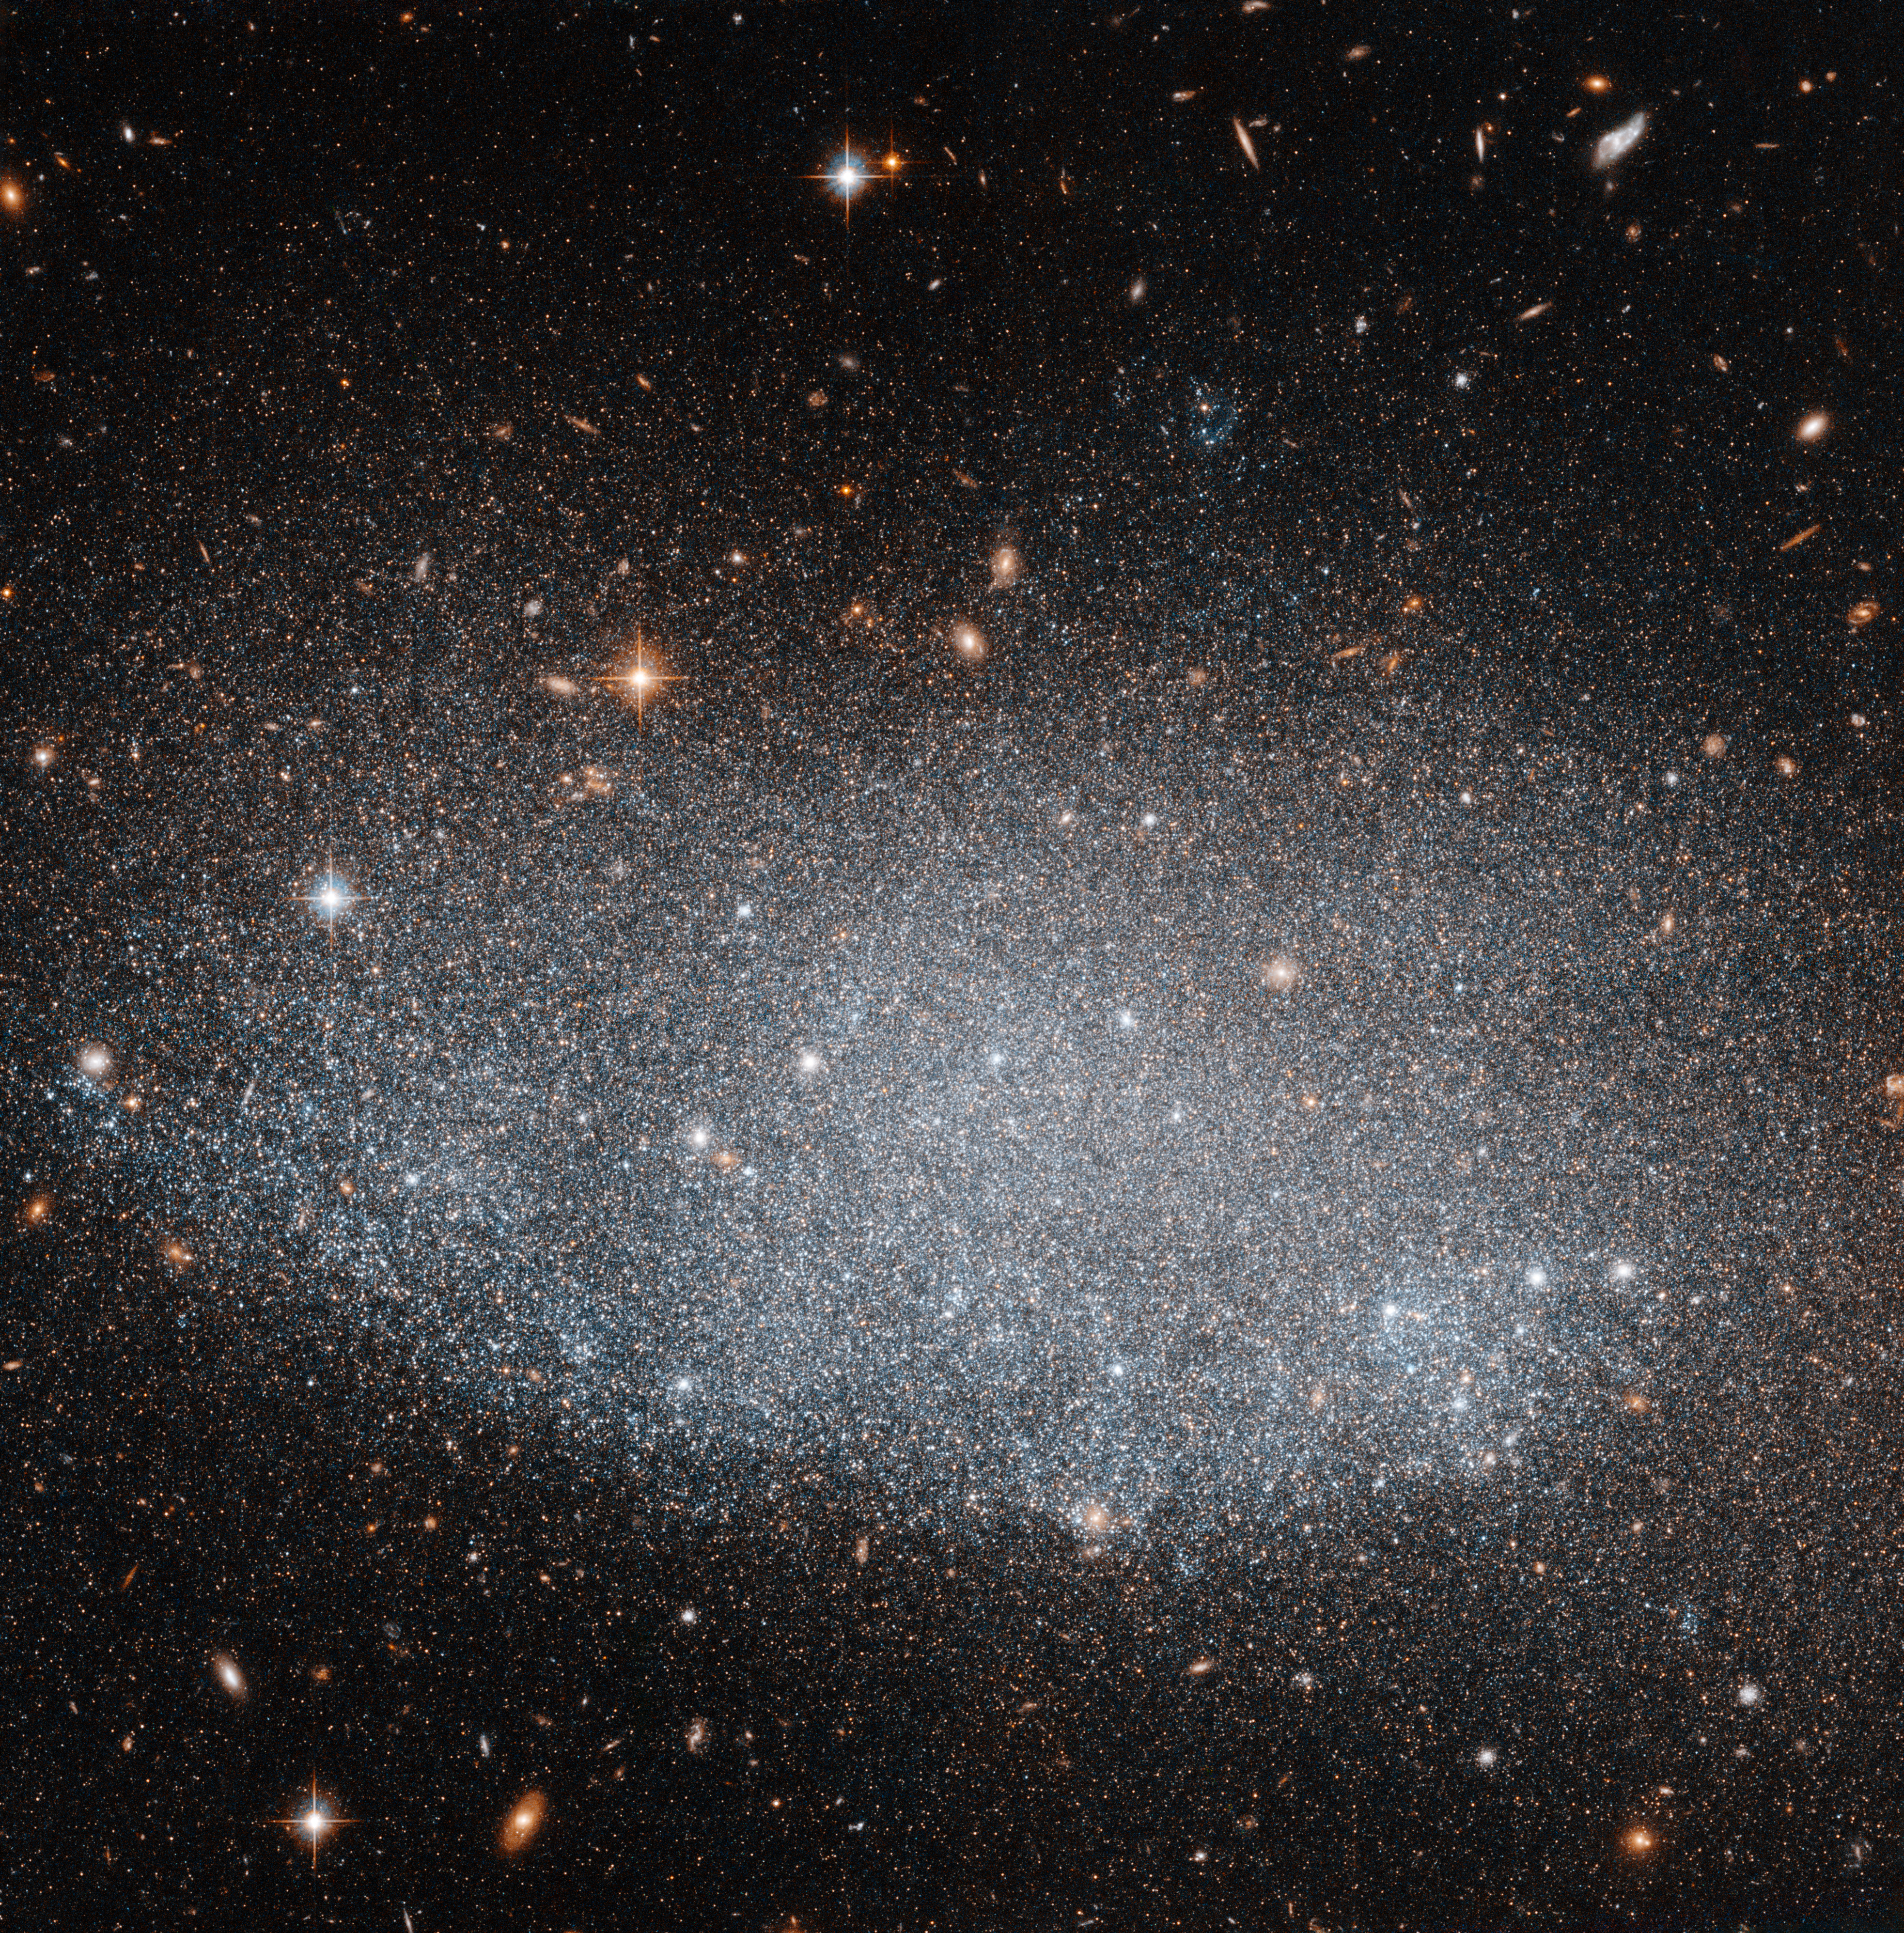

The mysteries of UGC 8201

The galaxy UGC 8201, captured here by the NASA/ESA Hubble Space Telescope, is a dwarf irregular galaxy, so called because of its small size and chaotic structure. It lies just under 15 million light-years away from us in the constellation of Draco (the Dragon). As with most dwarf galaxies it is a member of a larger group of galaxies. In this case UCG 8201 is part of the M81 galaxy group; this group is one of the closest neighbours to the Local Group of galaxies, which contains our galaxy, the Milky Way.

UGC 8201 is at an important phase in its evolution. It has recently finished a long period of star formation, which had significant impact on the whole galaxy. This episode lasted for several hundred million years and produced a high number of newborn bright stars. These stars can be seen in this image as the dominating light source within the galaxy. This process also changed the distribution and amount of dust and gas in between the stars in the galaxy.

Such large star formation events need extensive sources of energy to trigger them. However, compared to larger galaxies, dwarf galaxies lack such sources and they do not appear to have enough gas to produce as many new stars as they do. This raises an important unanswered question in galaxy evolution: How do relatively isolated, low-mass systems such as dwarf galaxies sustain star formation for extended periods of time?

Due to its relative proximity to Earth UGC 8201 is an excellent object for research and provides an opportunity to improve our understanding of how dwarf galaxies evolve and grow.

Credit: ESA/Hubble & NASA